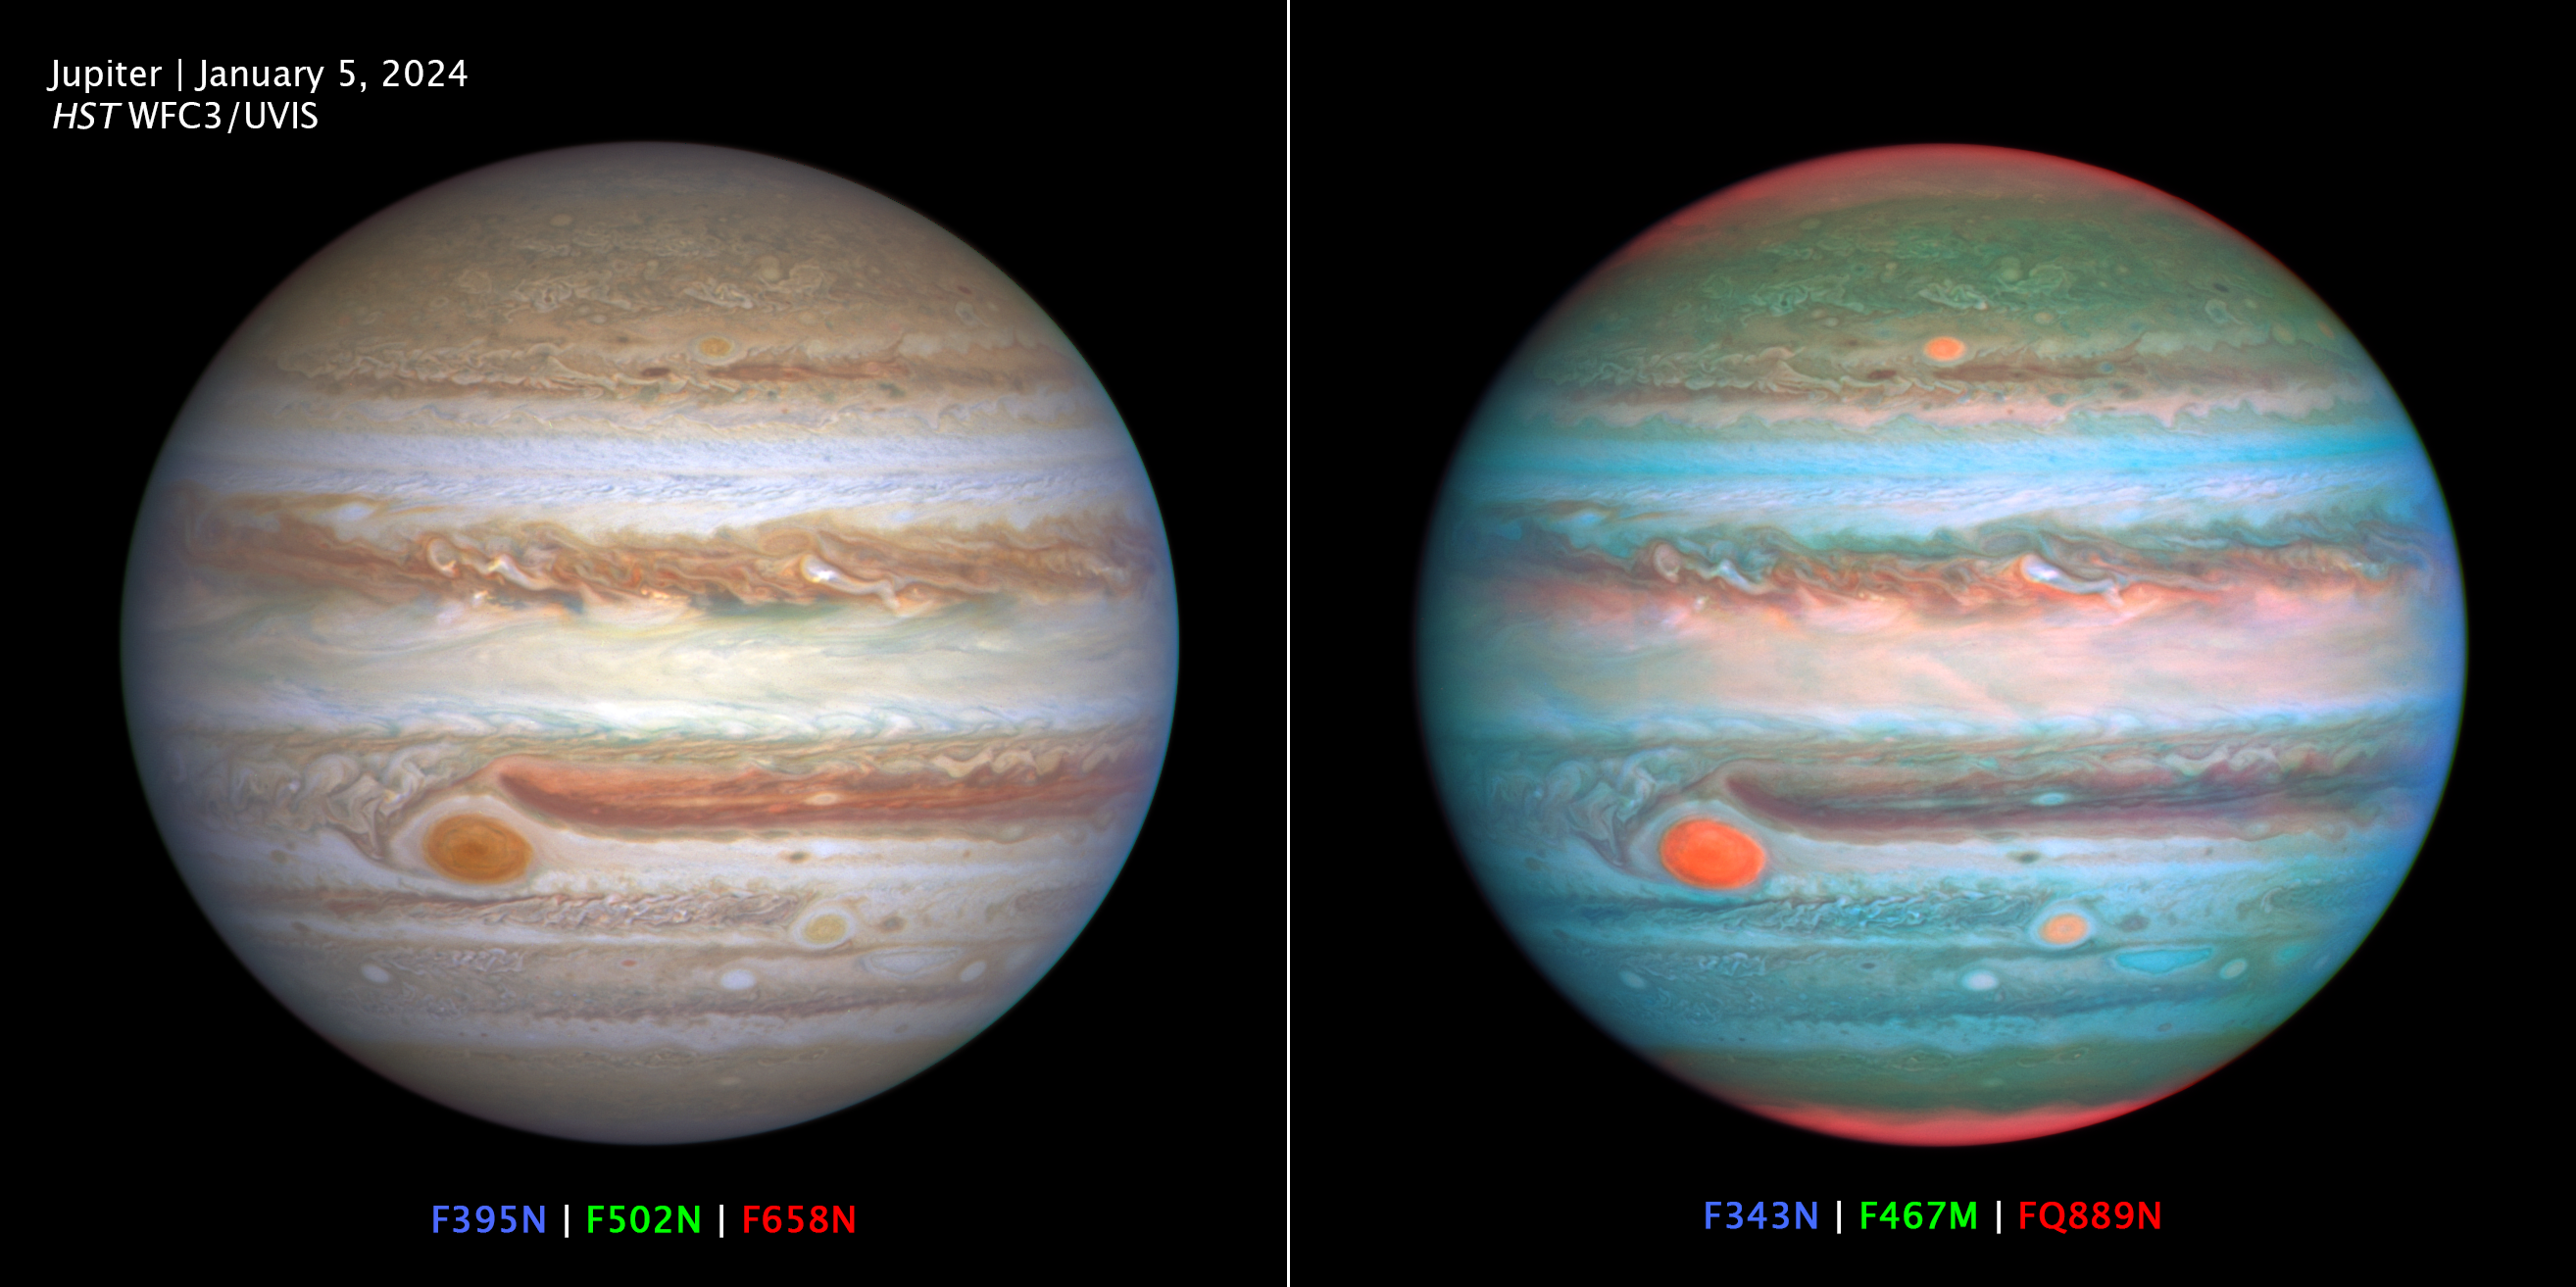

Multiwavelength OPAL Jupiter observation 2024

Two views of Jupiter showcase the wealth of information provided by the spectral filters on the Hubble Space Telescope’s Wide Field Camera 3 (WFC3) science instrument. At left, the RGB composite is created using three filters at wavelengths similar to the colors seen by the human eye. At right, the wavelength bounds are widened beyond the visible range to extend just into the ultraviolet (UV) and infrared regimes. Humans cannot perceive these extended wavelengths, but some animals are able to detect infrared and ultraviolet light. The result is a vivid disk that shows UV-absorbing lofty hazes as orange (over the poles and in three large storms, including the Great Red Spot), and freshly-formed ice as white (compact storm plumes just north of the equator). Astronomers, including the OPAL team, use these filters (and others not shown here) to study differences in cloud thickness, altitude, and chemical makeup.

Credit: NASA, ESA, A. Simon (NASA/GSFC), M. Wong (UC Berkeley), J. DePasquale (STScI)